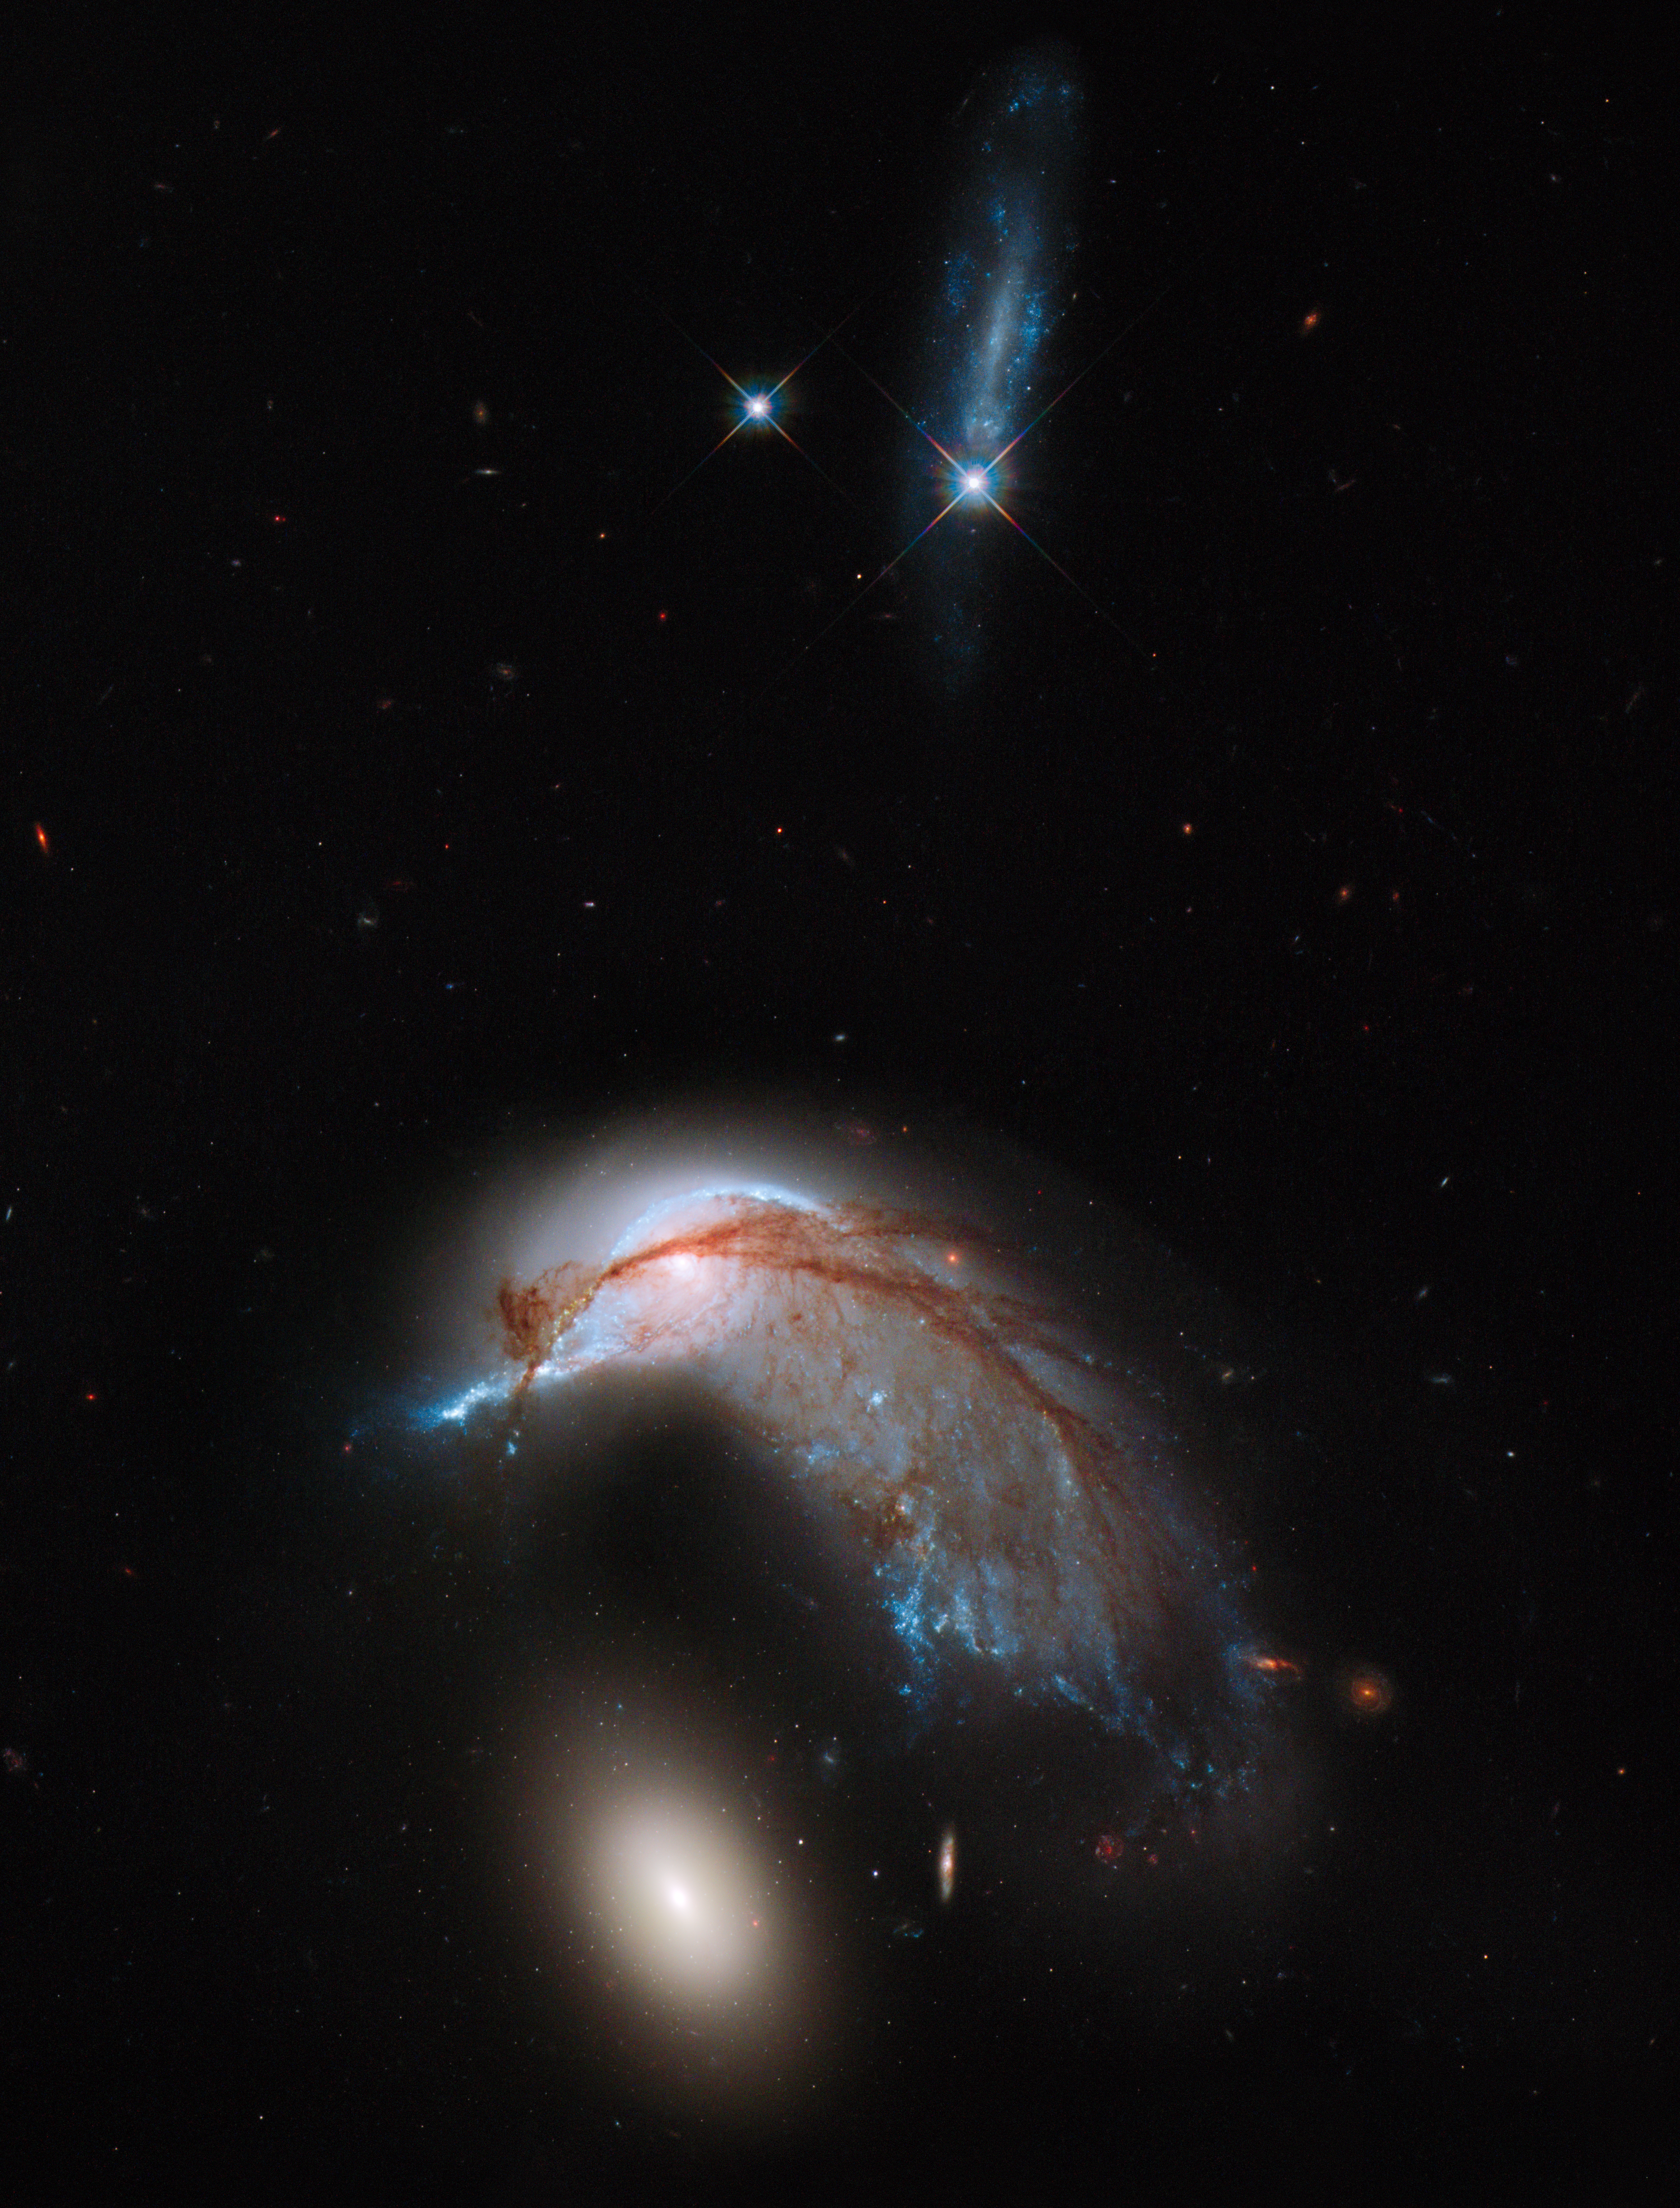

Hubble image of Arp 142

This image shows the two galaxies interacting. NGC 2936, once a standard spiral galaxy, and NGC 2937, a smaller elliptical, bear a striking resemblance to a penguin guarding its egg. This image is a combination of visible and infrared light, created from data gathered by the NASA/ESA Hubble Space Telescope Wide Field Planetary Camera 3 (WFC3).

Credit: NASA, ESA and the Hubble Heritage Team (STScI/AURA)